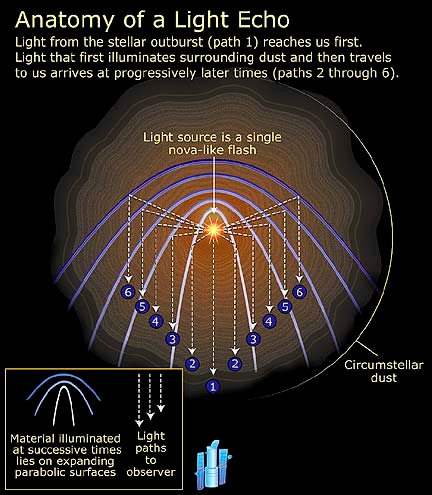

Anatomy of a light echo

This diagram explains the anatomy of a light eco. Light from the stellar outburst (path 1) reaches us first. Light that first illuminates surrounding dust and then travels to us arrives at progressively later times (paths 2 through 6).

Credit: NASA/ESA and A. Feild (STScI).